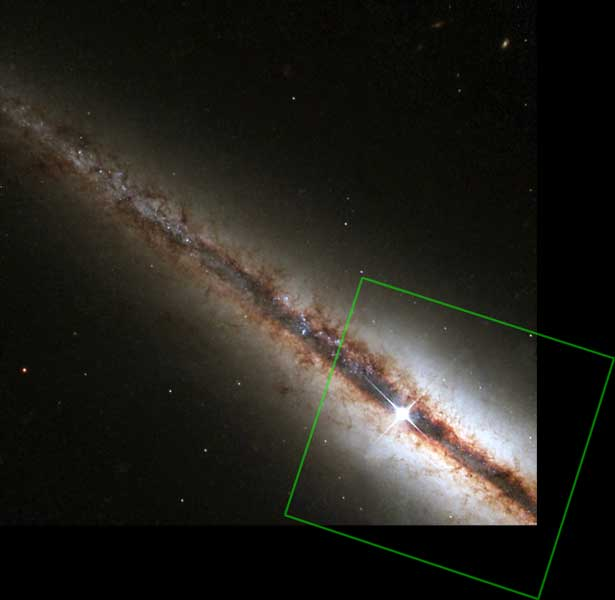

NGC 4013

HST/WFPC2 Visible-Light Image of NGC 4013 with Outline of the NICMOS Infrared-Light Image.

Credit: NASA/ESA and The Hubble Heritage Team (STScI/AURA)